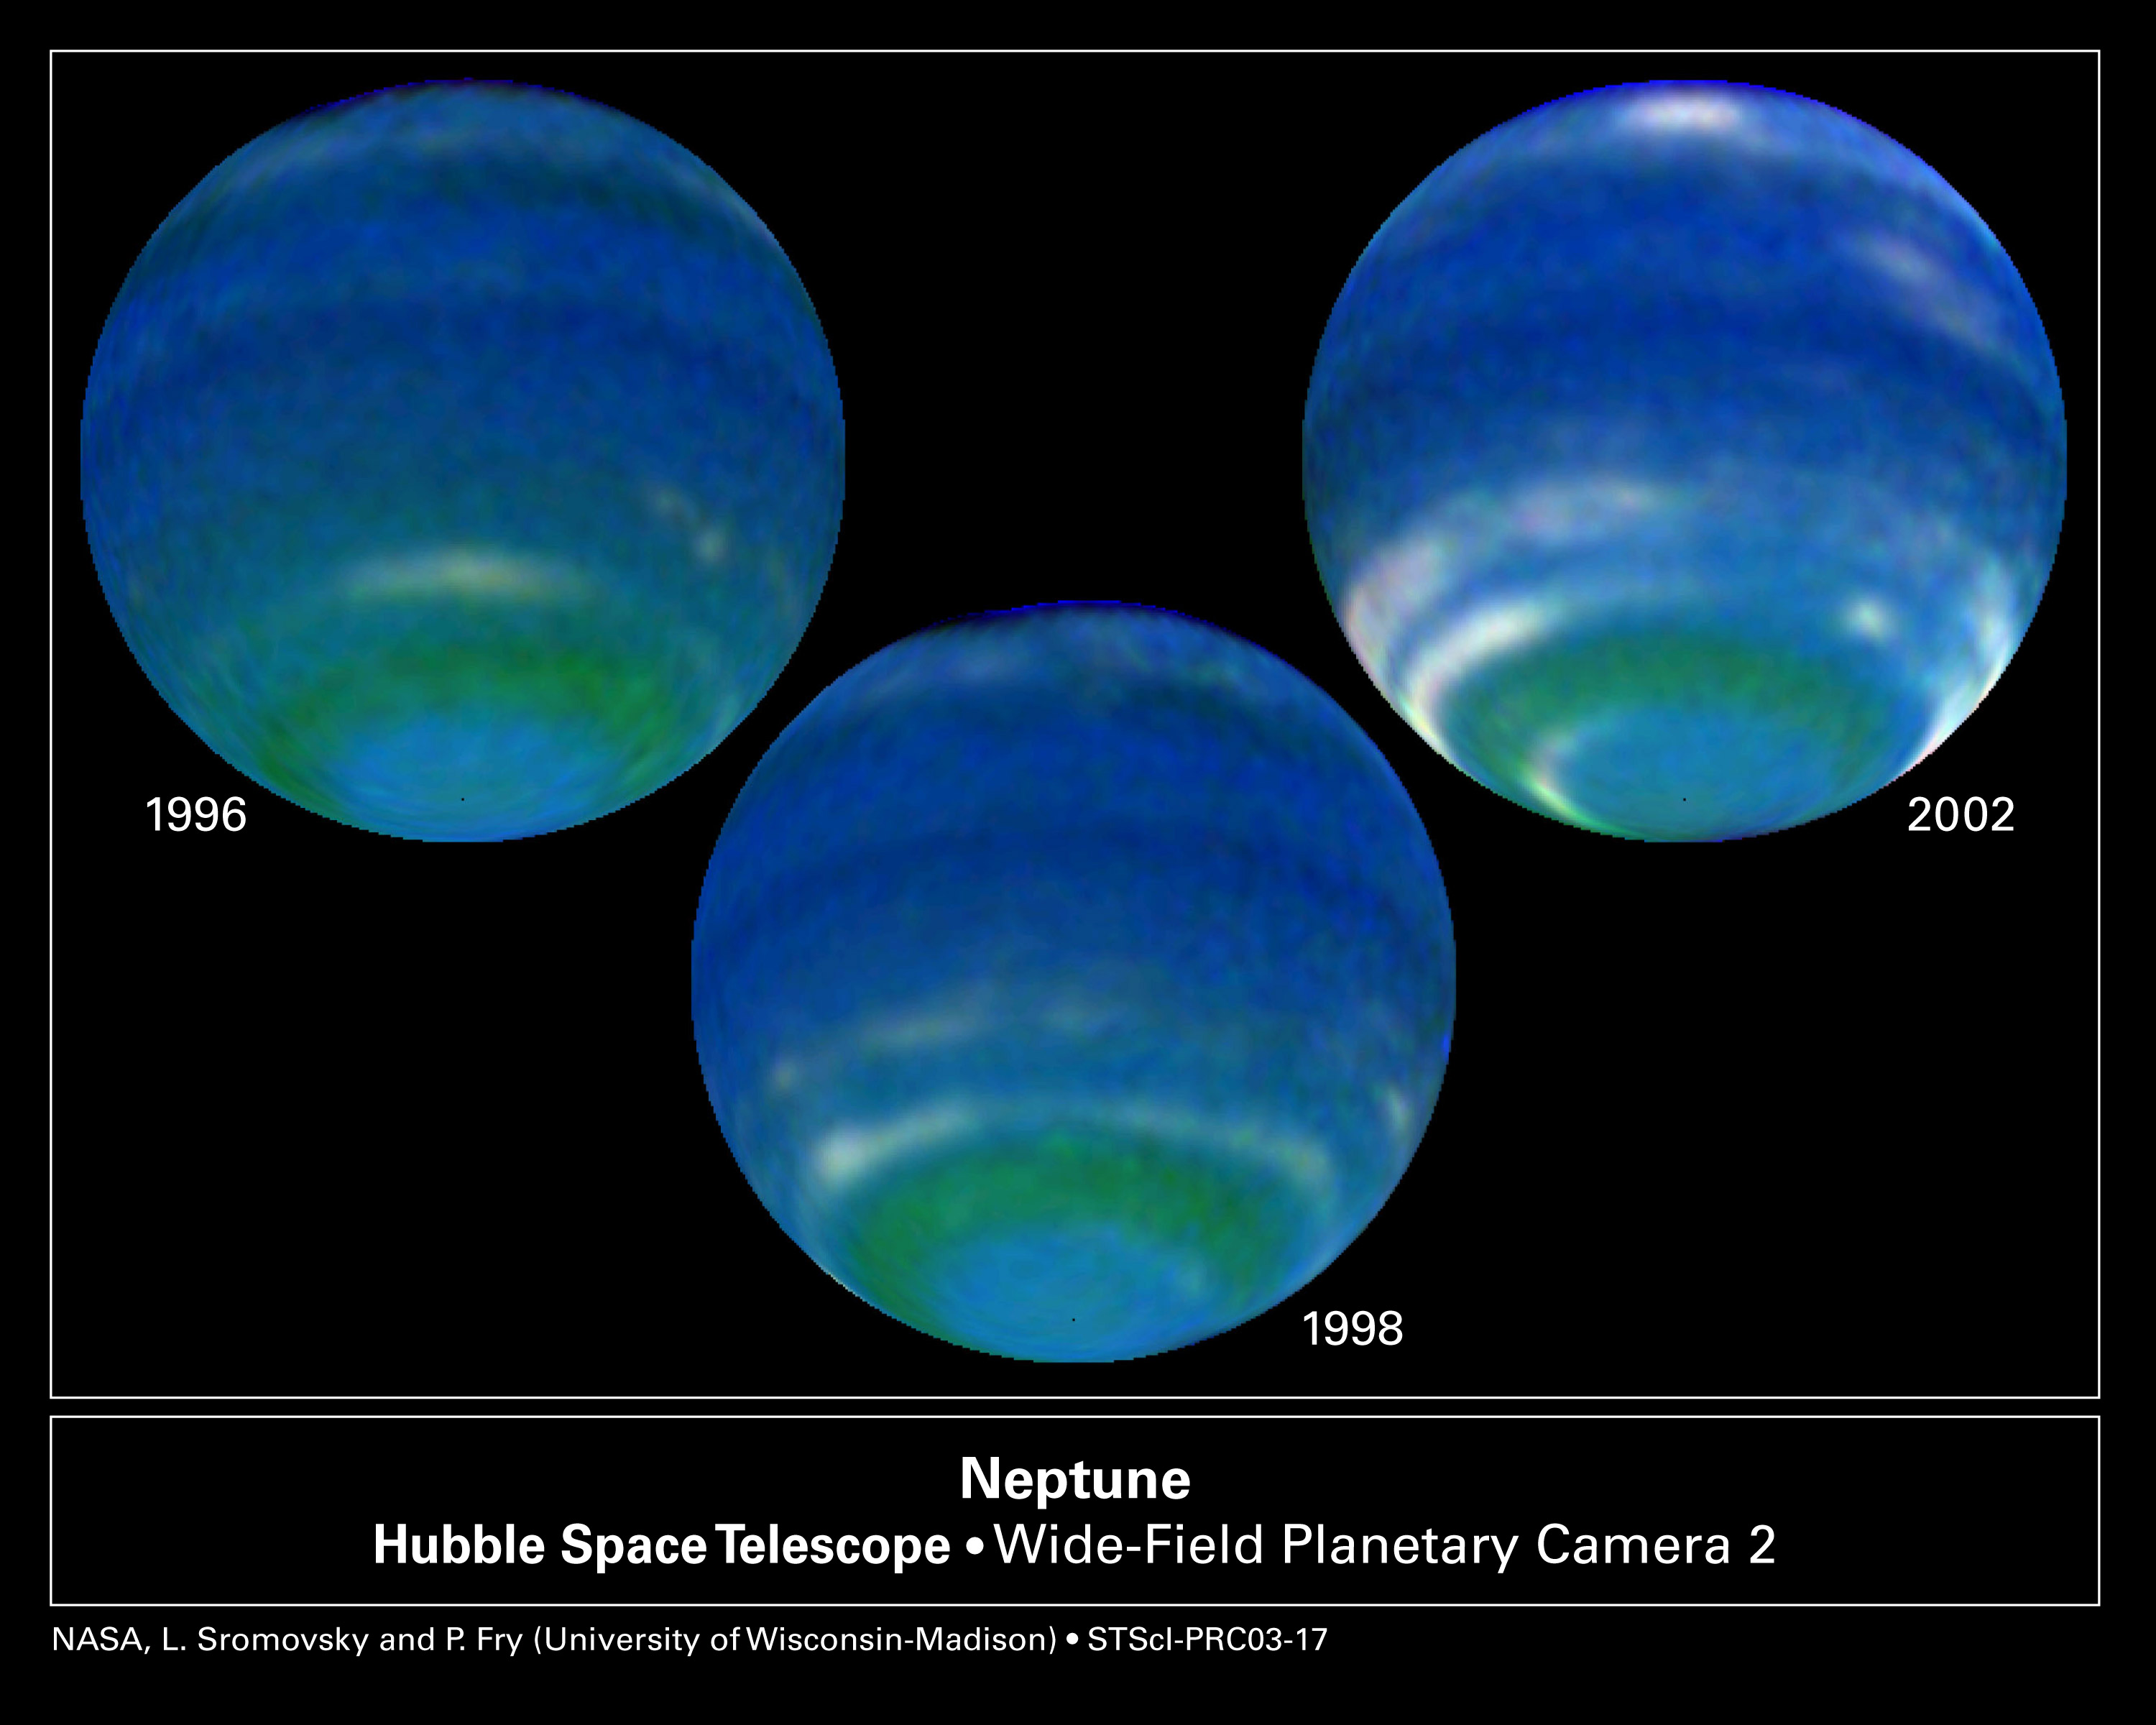

Springtime on Neptune

NASA/ESA Hubble Space Telescope observations in August 2002 show thatNeptune's brightness has increased significantly since 1996. The rise is due to an increase in the amount of clouds observed in the planet's southern hemisphere. These increases may be due to seasonal changes caused by a variation in solar heating. Because Neptune's rotation axis is inclined 29 degrees to its orbital plane, it is subject to seasonal solar heating during its 164.8-year orbit of the Sun. This seasonal variation is 900 times smaller than experienced by Earth because Neptune is much farther from the Sun. The rate of seasonal change also is much slower because Neptune takes 165 years to orbit the Sun. So, springtime in the southern hemisphere will last for several decades! Remarkably, this is evidence that Neptune is responding to the weak radiation from the Sun. These images were taken in visible and near-infrared light by Hubble's Wide Field and Planetary Camera 2.

Credit: NASA/ESA, L. Sromovsky, and P. Fry (University of Wisconsin-Madison)